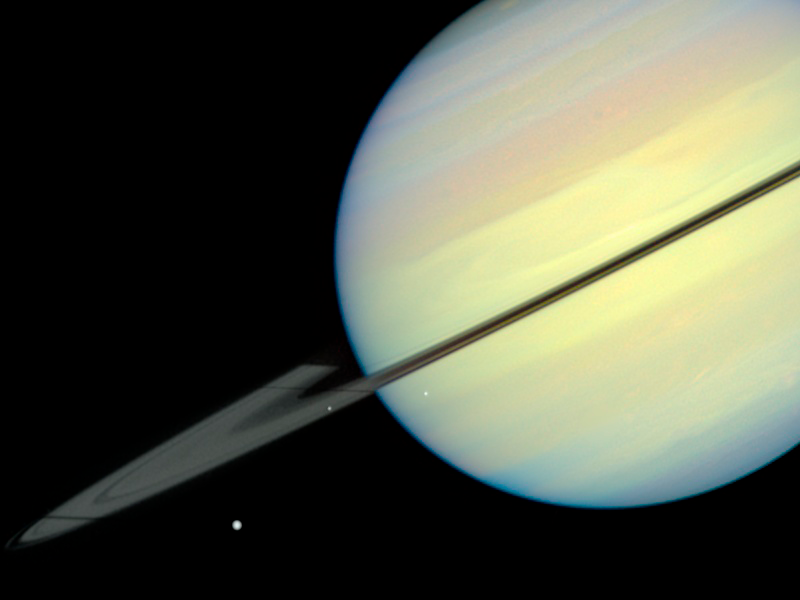

Saturn's Moons - Frame 1

This movie still captures the moons Mimas, Enceladus, and Dione as they begin their race across Saturn's disk. The still is from a movie created from images taken by NASA/ESA Hubble Space Telescope. It reveals the planet's rings tilted nearly edge-on toward the Sun, an event that occurs once every 15 years. Because of this special alignment, the moons cast shadows on the planet and its rings. Dione is on the far left of the image, Mimas is in the middle, and Enceladus is on the right. Dione and Enceladus are casting long shadows on the rings.

Credit: NASA/ESA and E. Karkoschka (University of Arizona)